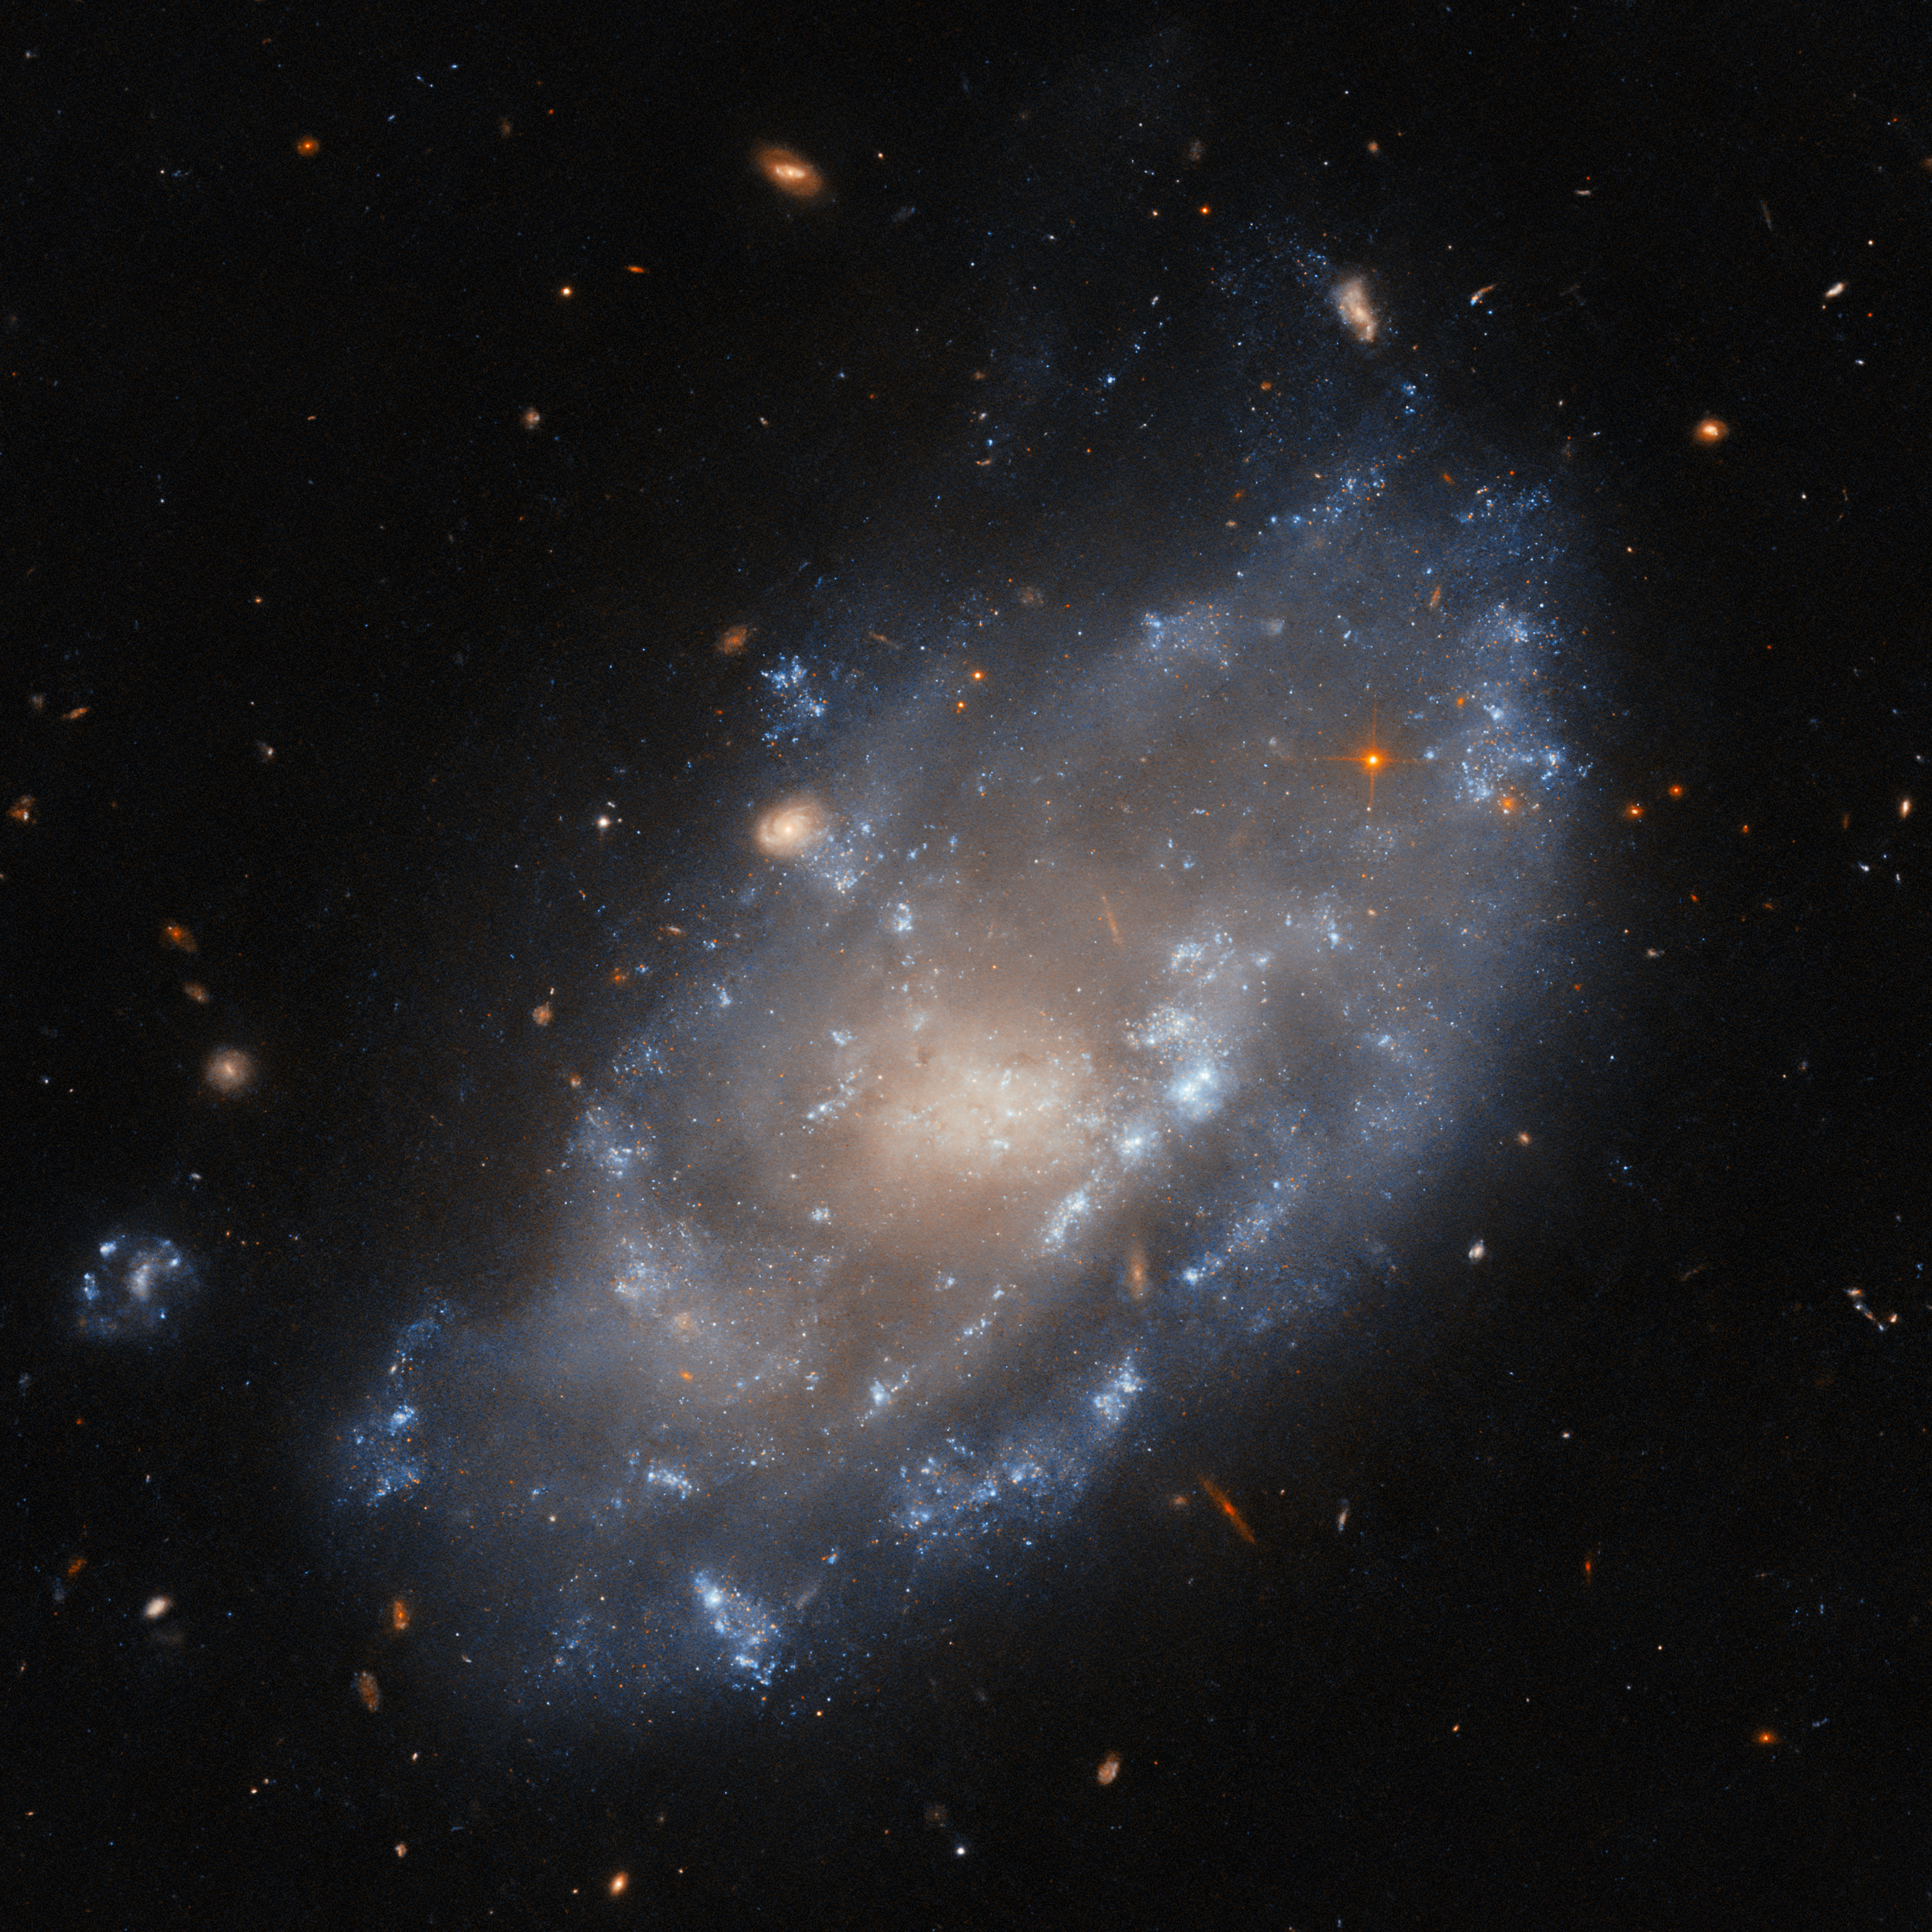

On the hunt for X-rays

Featured in this Hubble Picture of the Week this week is the dwarf galaxy IC 776. This swirling collection of stars new and old is located in the constellation Virgo — in fact, in the Virgo galaxy cluster — 100 million light-years from Earth. While a dwarf galaxy, it's also been classified as an SAB-type or ‘weakly barred’ spiral, one study naming it a “complex case” in morphology. This highly detailed view from Hubble demonstrates that complexity well. IC 776 has a ragged, disturbed disc that nevertheless looks to spiral around the core, and arcs of star-forming regions.

This image is from an observation programme dedicated to the study of dwarf galaxies in the Virgo cluster, searching for sources of X-rays in such galaxies. X-rays are often emitted by accretion discs, where material that is drawn into a compact object by gravity crashes together and forms a hot, glowing disc. The compact object can be a white dwarf or neutron star in a binary pair, stealing material from its companion star, or it can be the supermassive black hole at the heart of a galaxy, devouring all around it. Dwarf galaxies like IC 776, travelling through the Virgo cluster, experience a pressure from the intergalactic gas which can both stimulate star formation and feed the central black hole in a galaxy. That can create energetic accretion discs, hot enough to emit X-rays.

While Hubble is not able to see X-rays, it can coordinate with X-ray telescopes such as NASA’s Chandra, revealing the sources of this radiation in high resolution using visible light. Dwarf galaxies are thought to be very important for our understanding of cosmology and the evolution of galaxies. As with many areas of astronomy, the ability to examine these galaxies across the electromagnetic spectrum is critical to their study.

Credit: ESA/Hubble & NASA, M. Sun